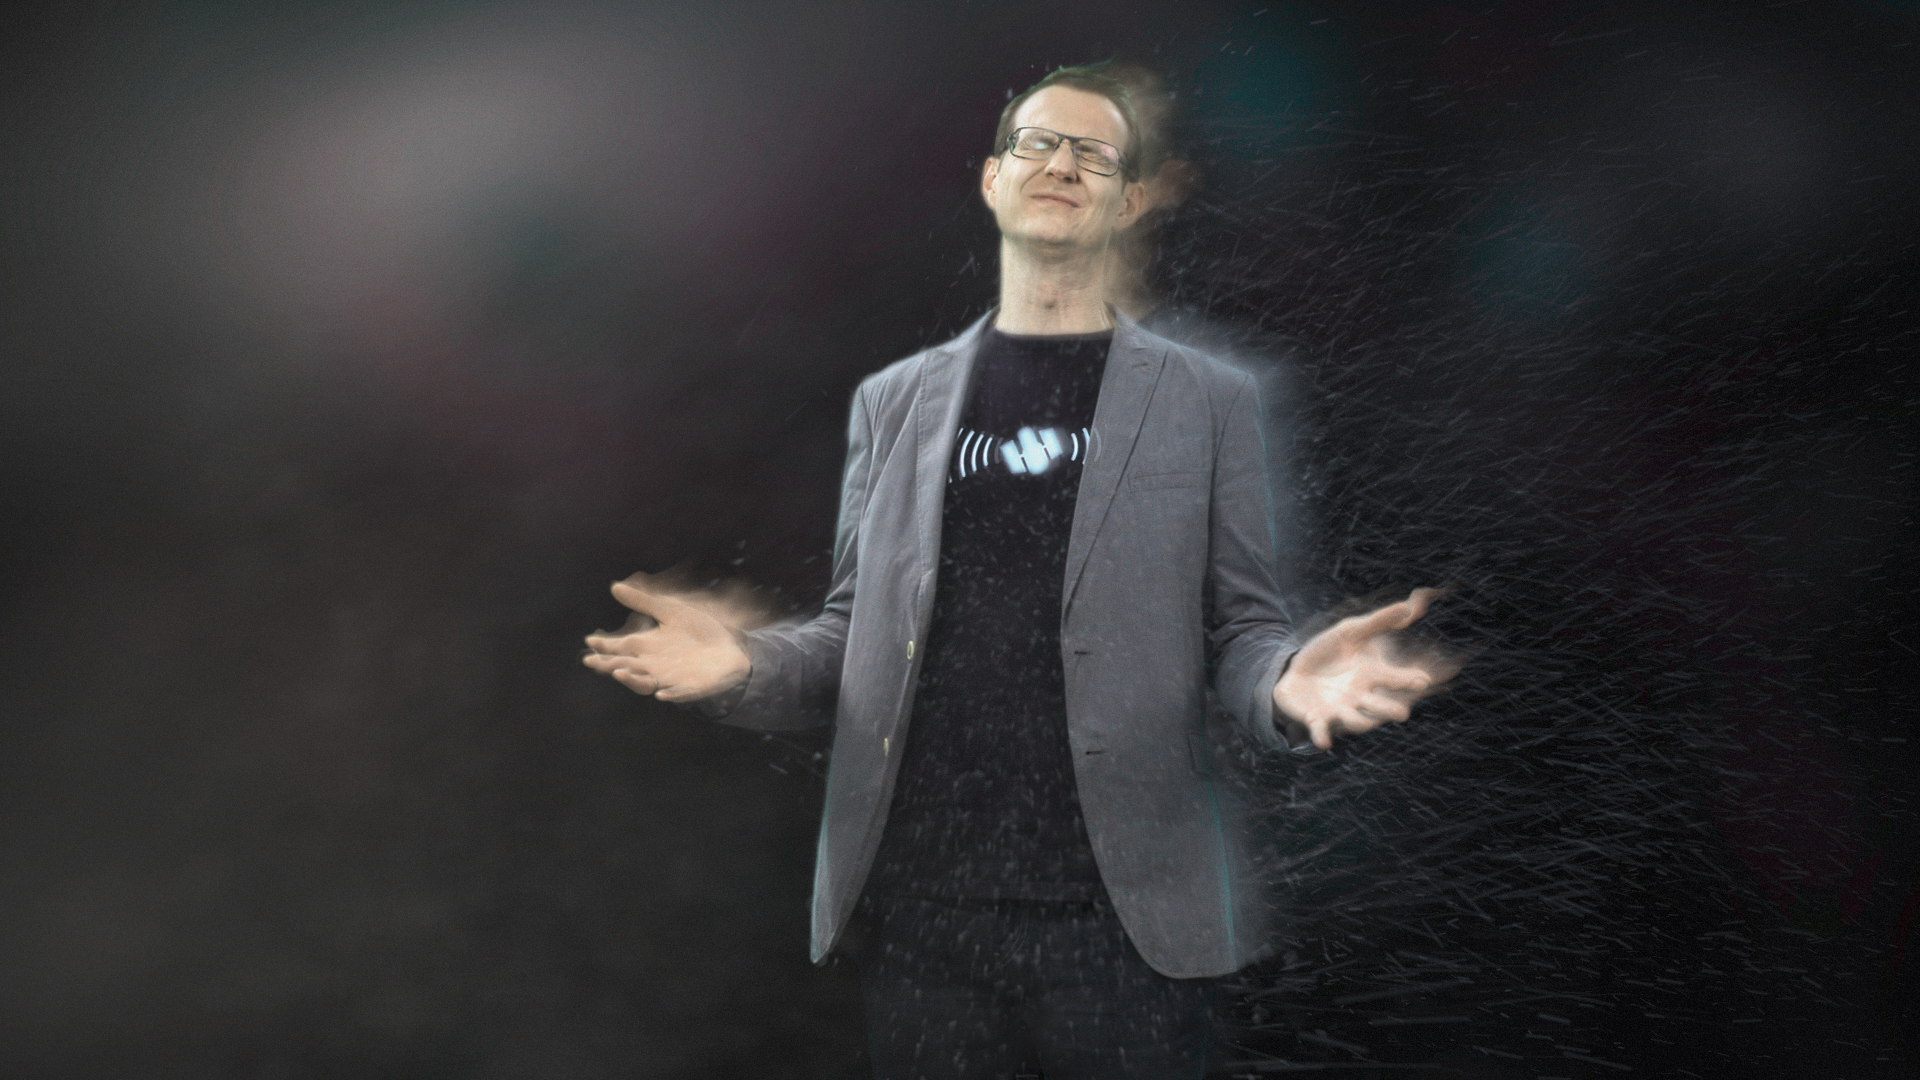

Screenshot of Hubblecast 72

Screenshot of Hubblecast 72: Clues to a cosmic crime.

Credit: NASA & ESA